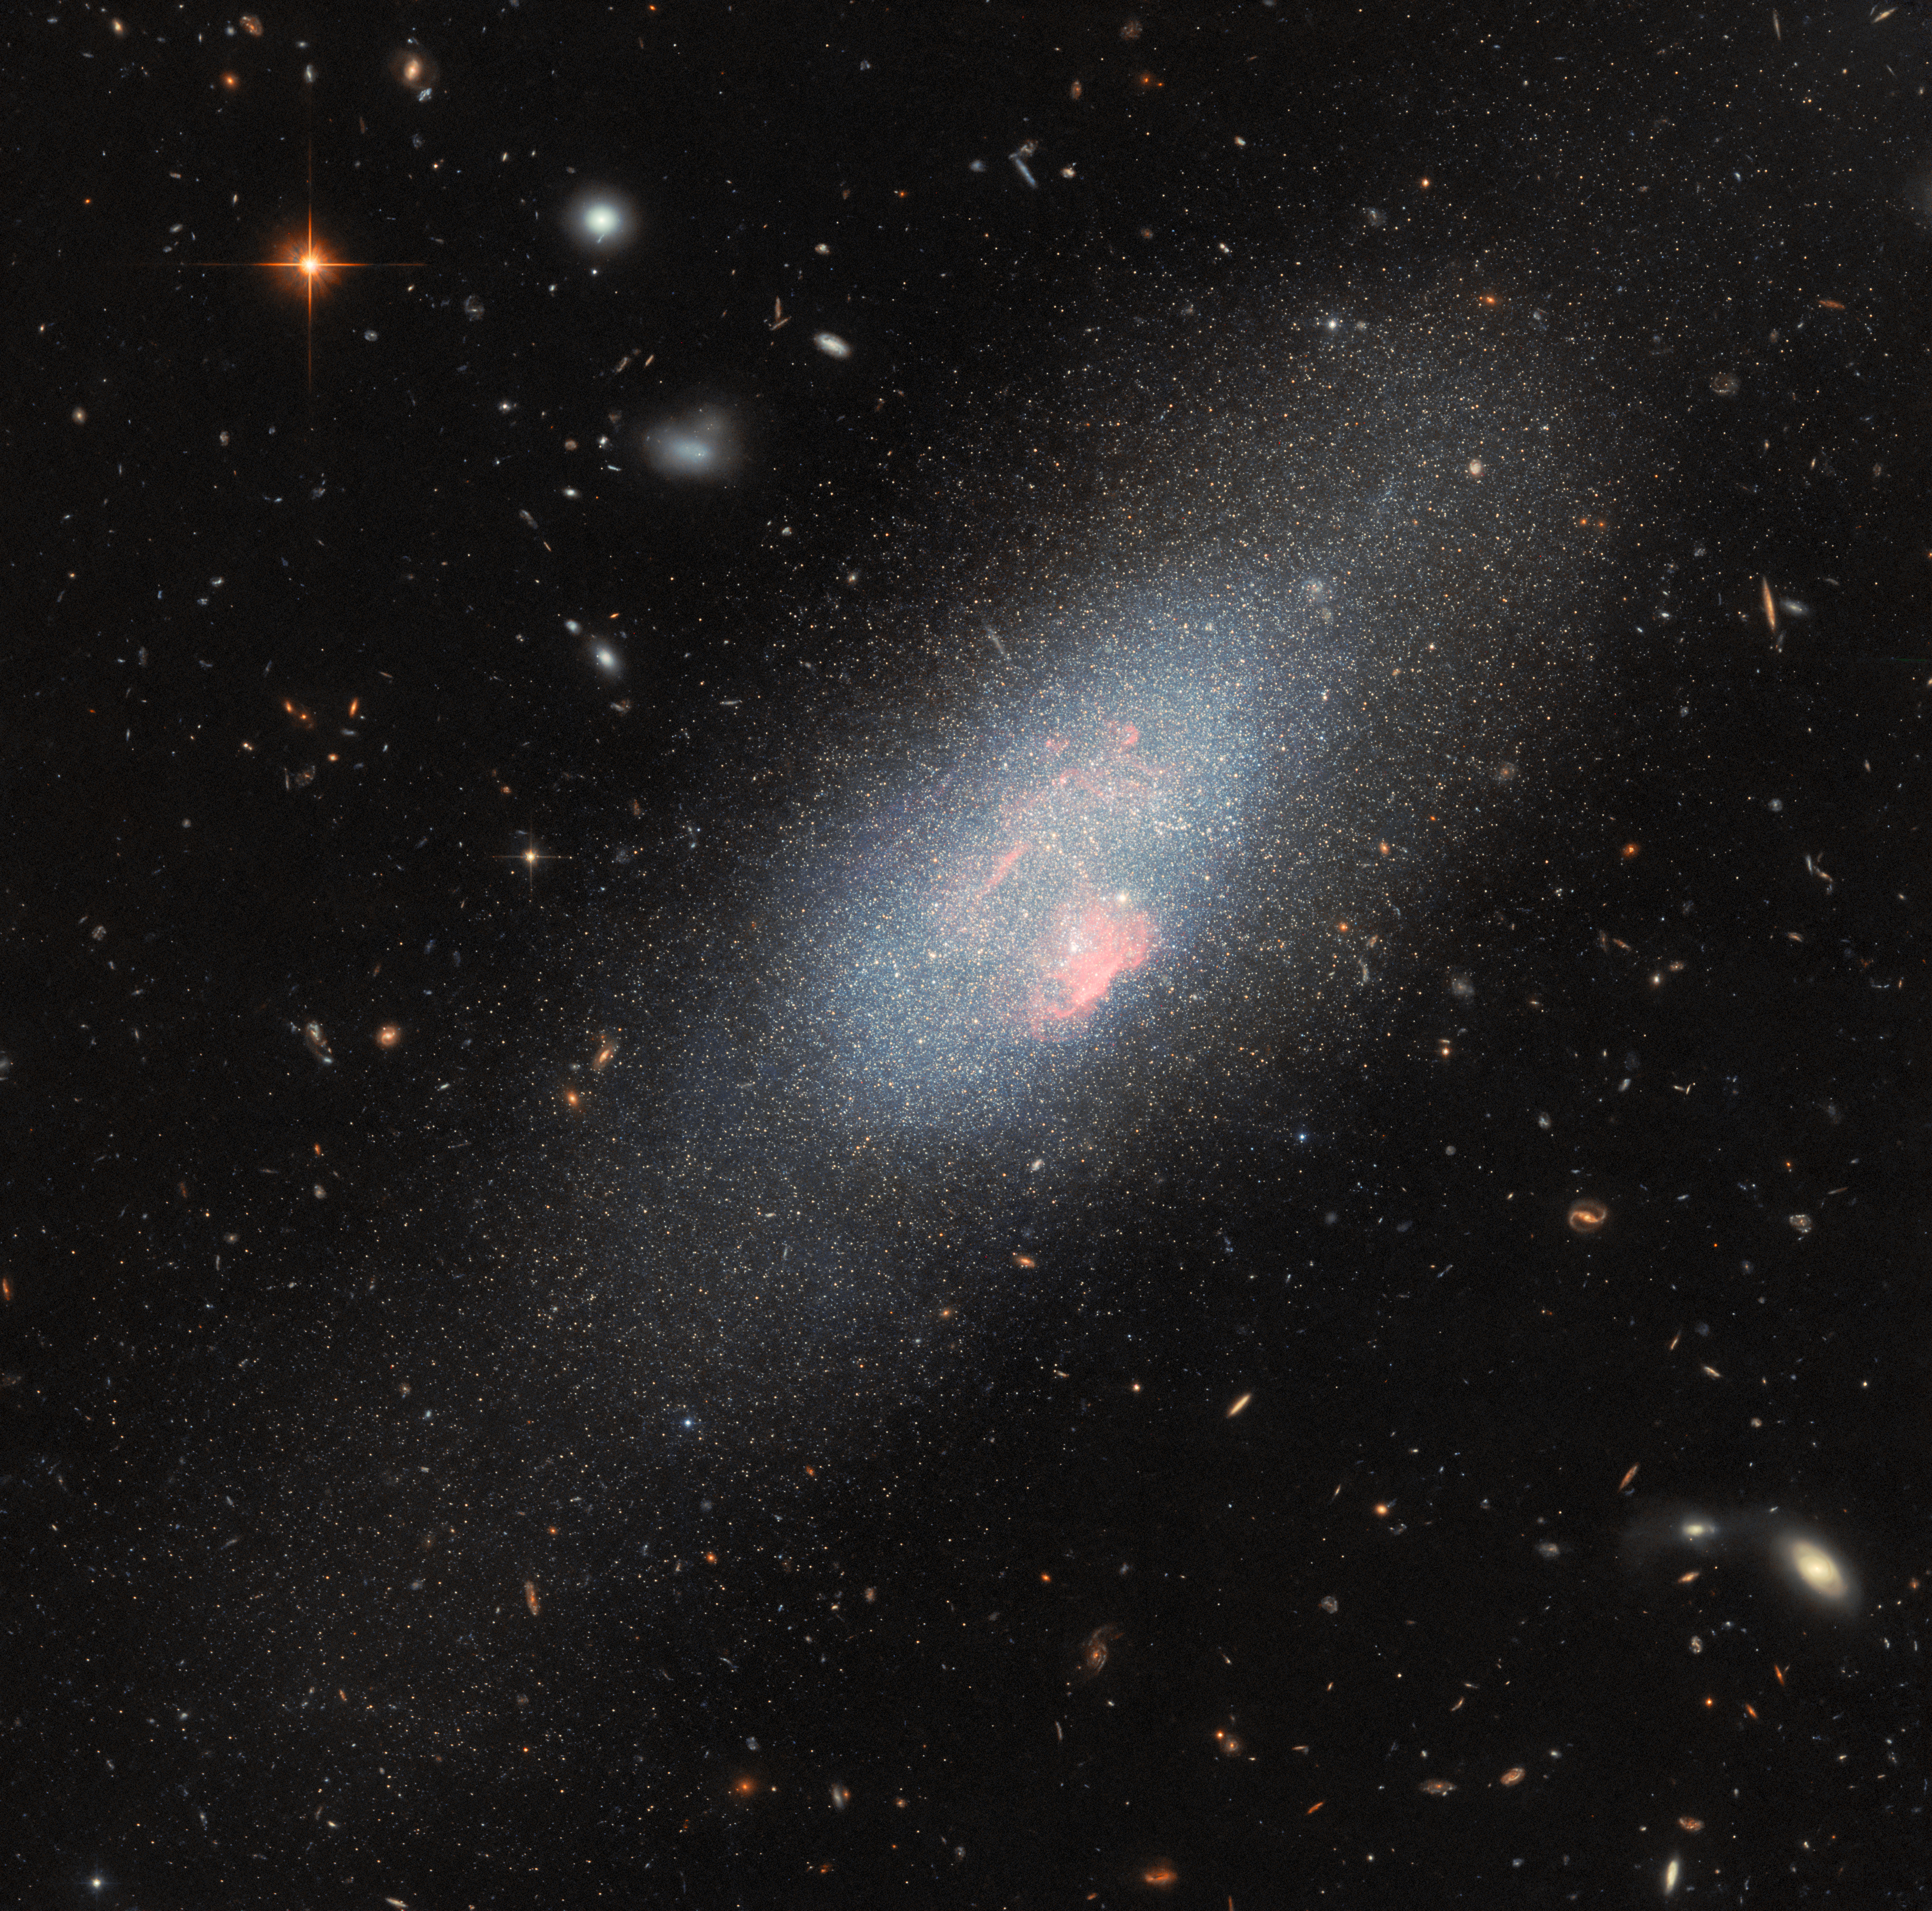

Massive stars make their mark

This glittering blue galaxy and subject of today’s ESA/Hubble Picture of the Week is a blue compact dwarf galaxy called Markarian 178 (Mrk 178). This galaxy, which is substantially smaller than our own Milky Way, lies 13 million light-years away in the constellation Ursa Major (The Great Bear).

Mrk 178 is one of more than 1500 Markarian galaxies. These galaxies get their name from the Armenian astrophysicist Benjamin Markarian, who compiled a list of galaxies that were surprisingly bright in ultraviolet light.

While the bulk of the galaxy is blue owing to an abundance of young, hot stars with little dust shrouding them, Mrk 178 gets a red hue from a collection of massive stars, which are especially concentrated in the brightest, reddish region near the galaxy’s edge. This azure cloud is home to a large number of rare objects called Wolf–Rayet stars. Wolf–Rayet stars are massive stars that are casting off their atmospheres through powerful winds. Because Mrk 178 contains so many Wolf–Rayet stars, the bright emission lines from these stars’ hot stellar winds are etched upon the galaxy’s spectrum. Particularly ionised hydrogen and oxygen appear as a red colour to Mrk 178 in this photo, observed using some of Hubble’s specialised light filters.

Massive stars enter the Wolf–Rayet phase just before they collapse into black holes or neutron stars. Because Wolf–Rayet stars last for only a few million years, researchers know that something must have triggered a recent burst of star formation in Mrk 178. At first glance, it’s not clear what could be the cause — Mrk 178 doesn’t seem to have any close galactic neighbours that could have stirred up its gas to form new stars. Astronomers believe that it was triggered by the interaction with a smaller satellite, as revealed by the presence of low surface brightness tidal features detected around Mrk178 in deep imaging acquired with the Large Binocular Telescope. Future high resolution Hubble data will be crucial to study the detailed star formation history of Mrk 178.

Credit: ESA/Hubble & NASA, F. Annibali, S. Hong